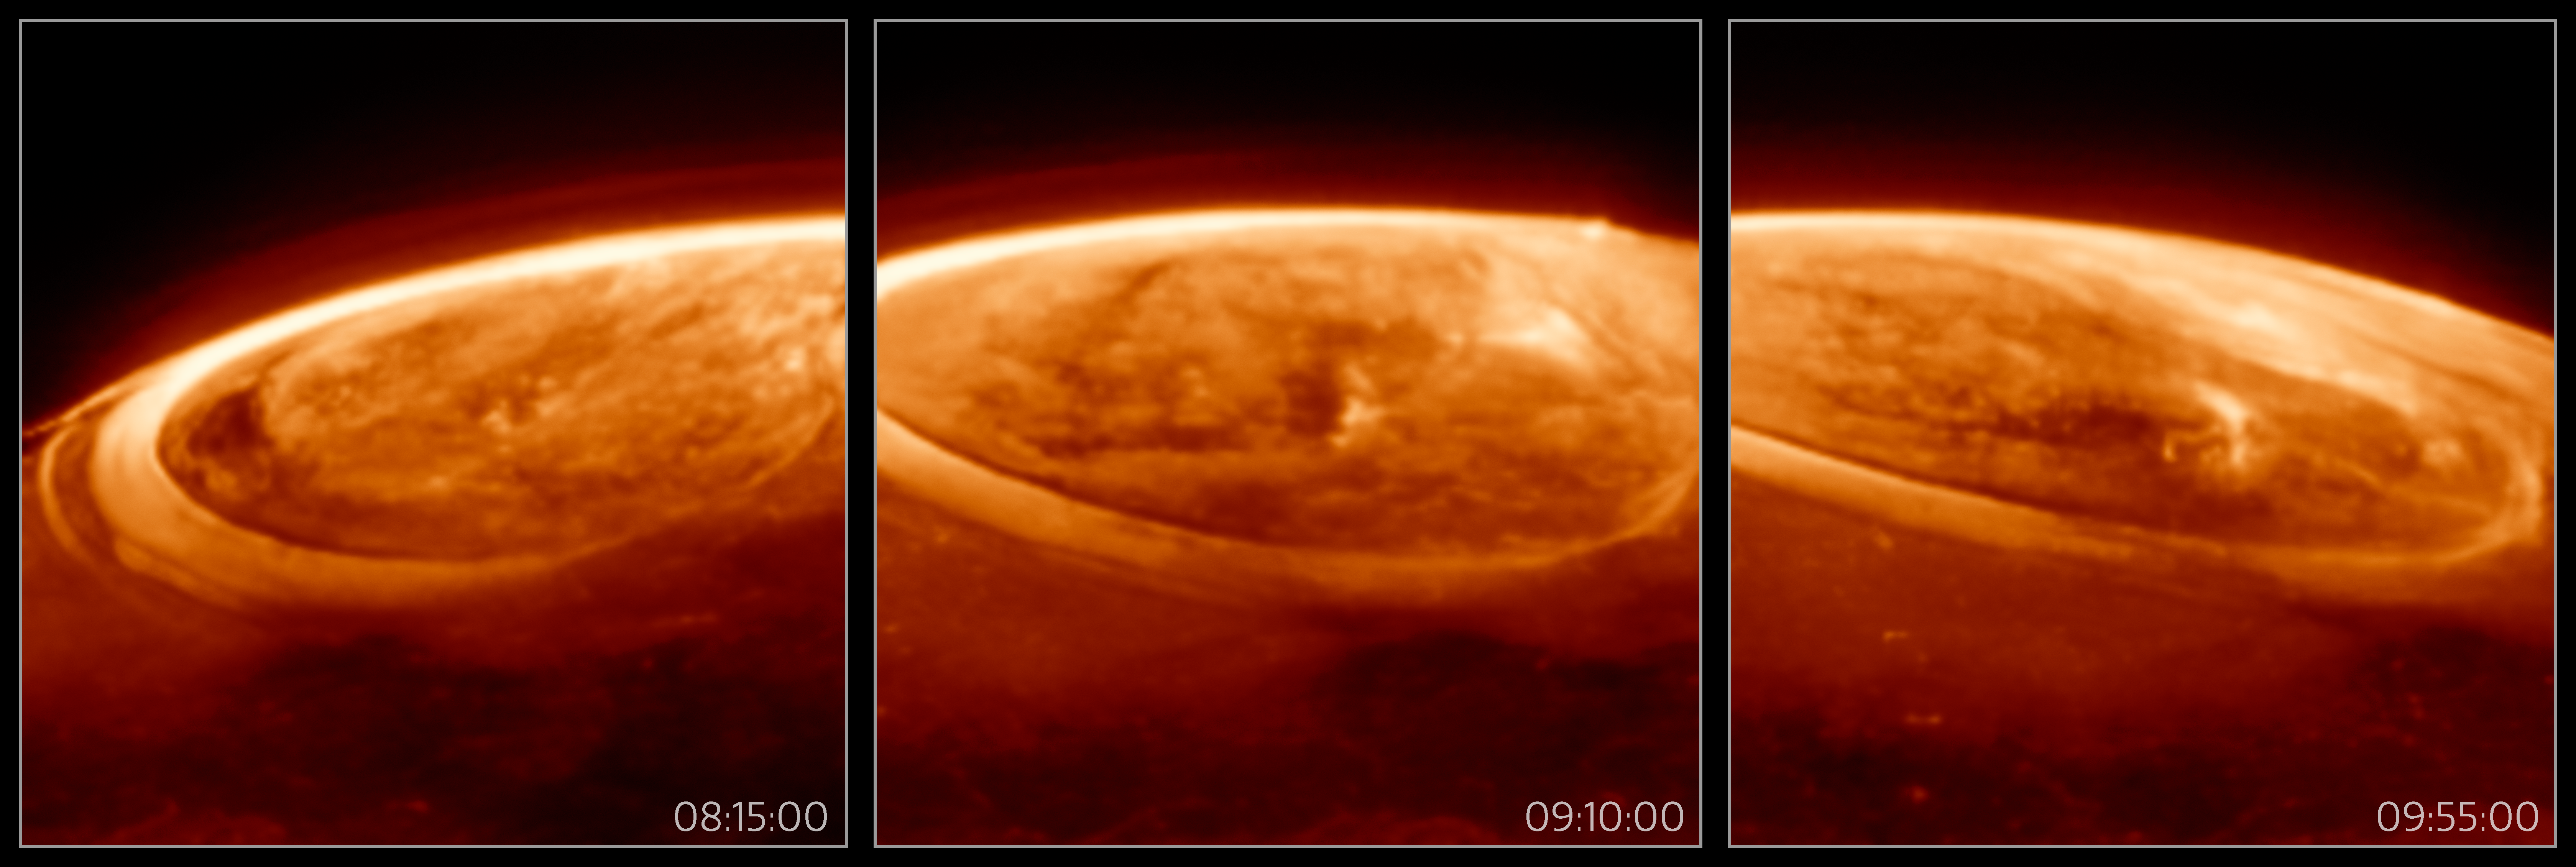

Close-up observations of auroras on Jupiter (annotated)

The NASA/ESA/CSA James Webb Space Telescope has captured new details of the auroras on our Solar System’s largest planet. The dancing lights observed on Jupiter are hundreds of times brighter than those seen on Earth.

These observations of Jupiter’s auroras were captured with Webb’s Near-InfraRed Camera (NIRCam) on 25 December 2023 (F335M filter). Scientists found that the emission from the trihydrogen ion, known as H3+, is far more variable than previously believed. H3+ is created by the impact of high energy electrons on molecular hydrogen. Because this emission shines brightly in the infrared, Webb’s instruments are well equipped to observe it.

The timestamps indicated in the lower right corner of each image indicates the time (UTC) when these observations were taken on 25 December 2023.

A video of these observations can be found here.

Credit: ESA/Webb, NASA, CSA, J. Nichols(University of Leicester), M. Zamani (ESA/Webb)